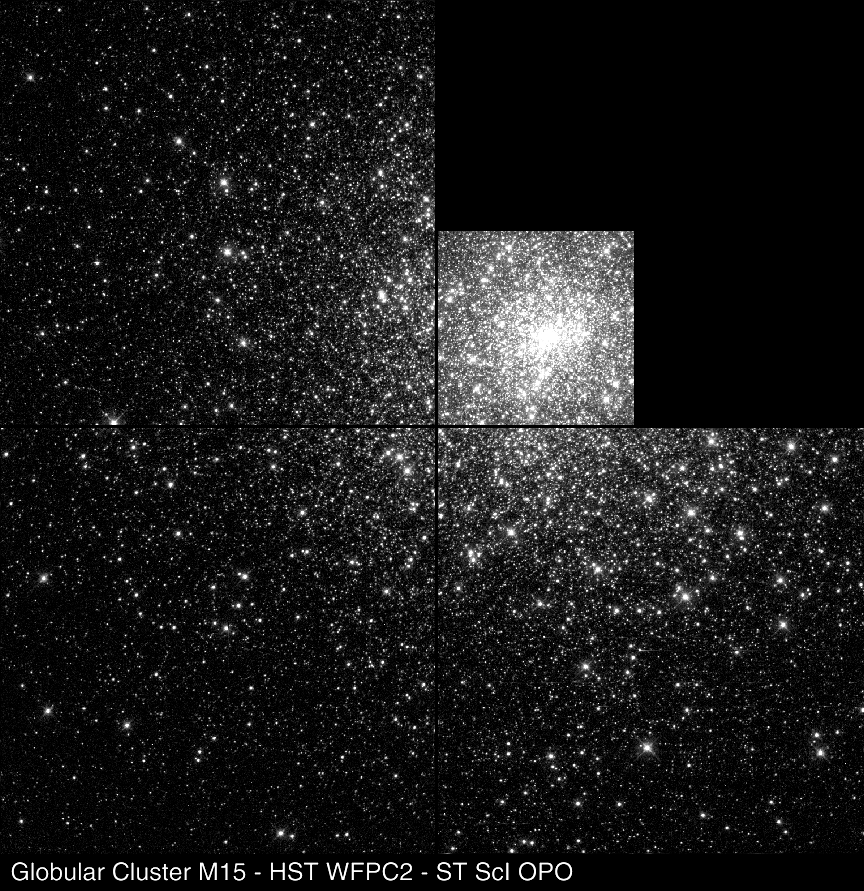

Globular Cluster M 15

This picture shows the central portion of M15, photographed with Hubble's Wide Field Planetary Camera 2. The image is about 28 light-years across.

Credit: P. Guhathakurta (UCO/Lick Observatory, UC Santa Cruz), B. Yanny (Fermi National Accelerator Lab), D. Schneider (Pennsylvania State Univ.), J. Bahcall (Inst. for Advanced Study), and NASA/ESA